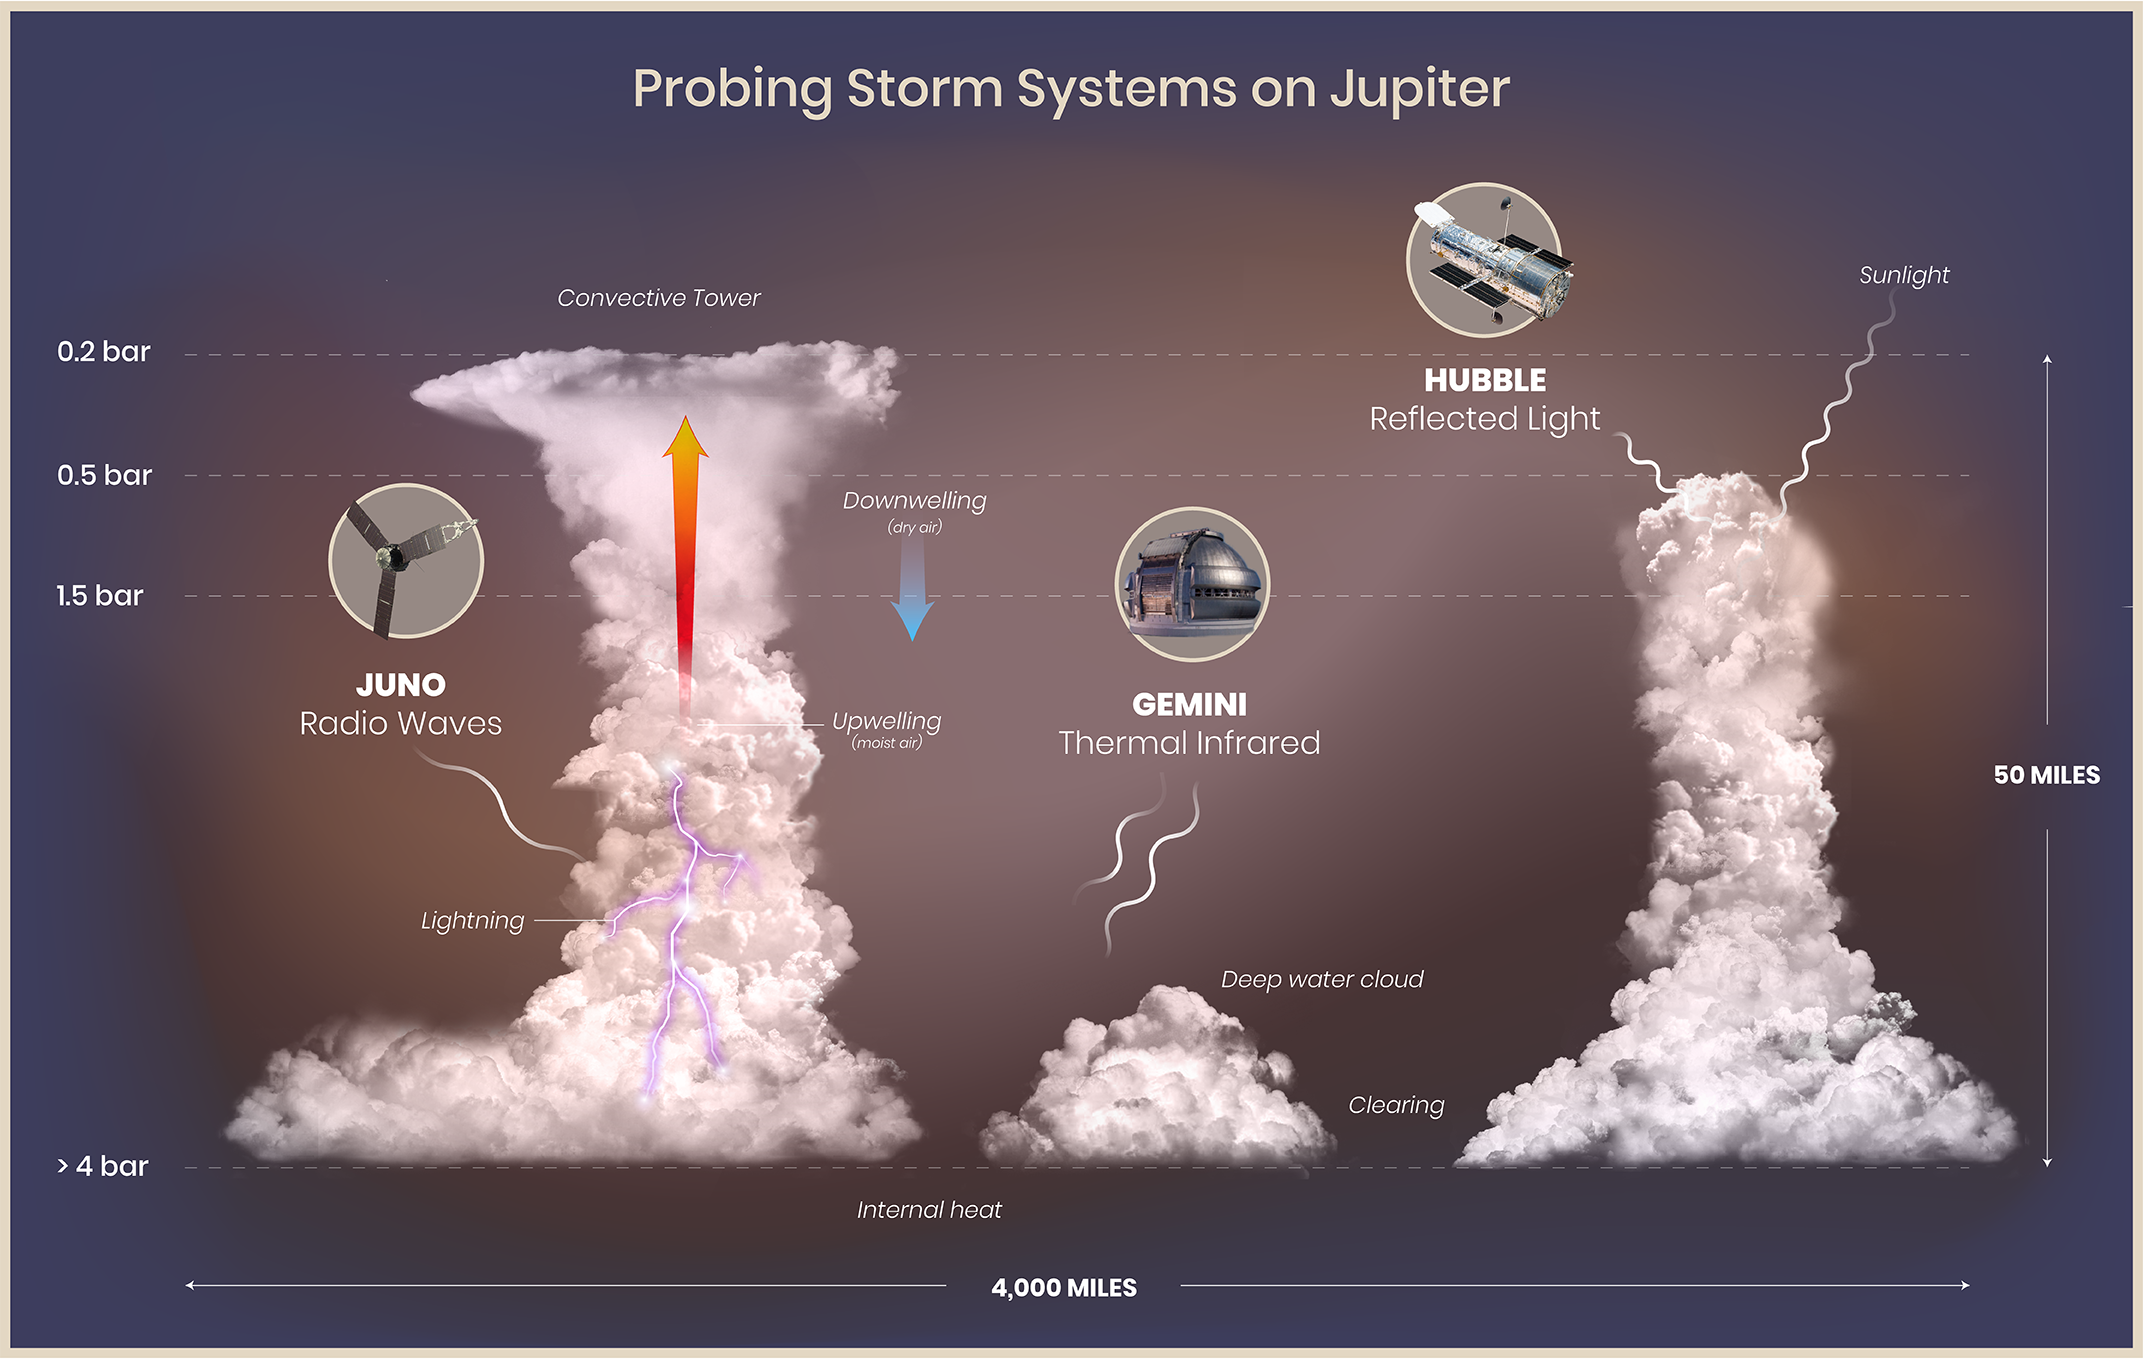

Hubble Probes Storm Systems on Jupiter

Thanks to collaborative observations by the NASA/ESA Hubble Space Telescope, the Gemini Observatory, and the Juno spacecraft, scientists have probed deeper into the atmosphere of the planet Jupiter. This collection of observations have facilitated the monitoring of Jupiter's weather and to estimate the amount of water in the atmosphere, providing insight into how Jupiter operates today as well as how it and the other planets in our solar system formed more than four-and-a-half billion years ago.

This illustration of lightning, convective towers (thunderheads), deep water clouds, and clearings in Jupiter's atmosphere is based on data collected by these observatories. The Hubble Space Telescope has detected sunlight that is reflected off clouds in Jupiter's atmosphere. Different wavelengths penetrate to different depths in the clouds, giving researchers the ability to determine the relative heights of cloud tops.

Credit: NASA, ESA, M.H. Wong (UC Berkeley), and A. James and M.W. Carruthers (STScI)